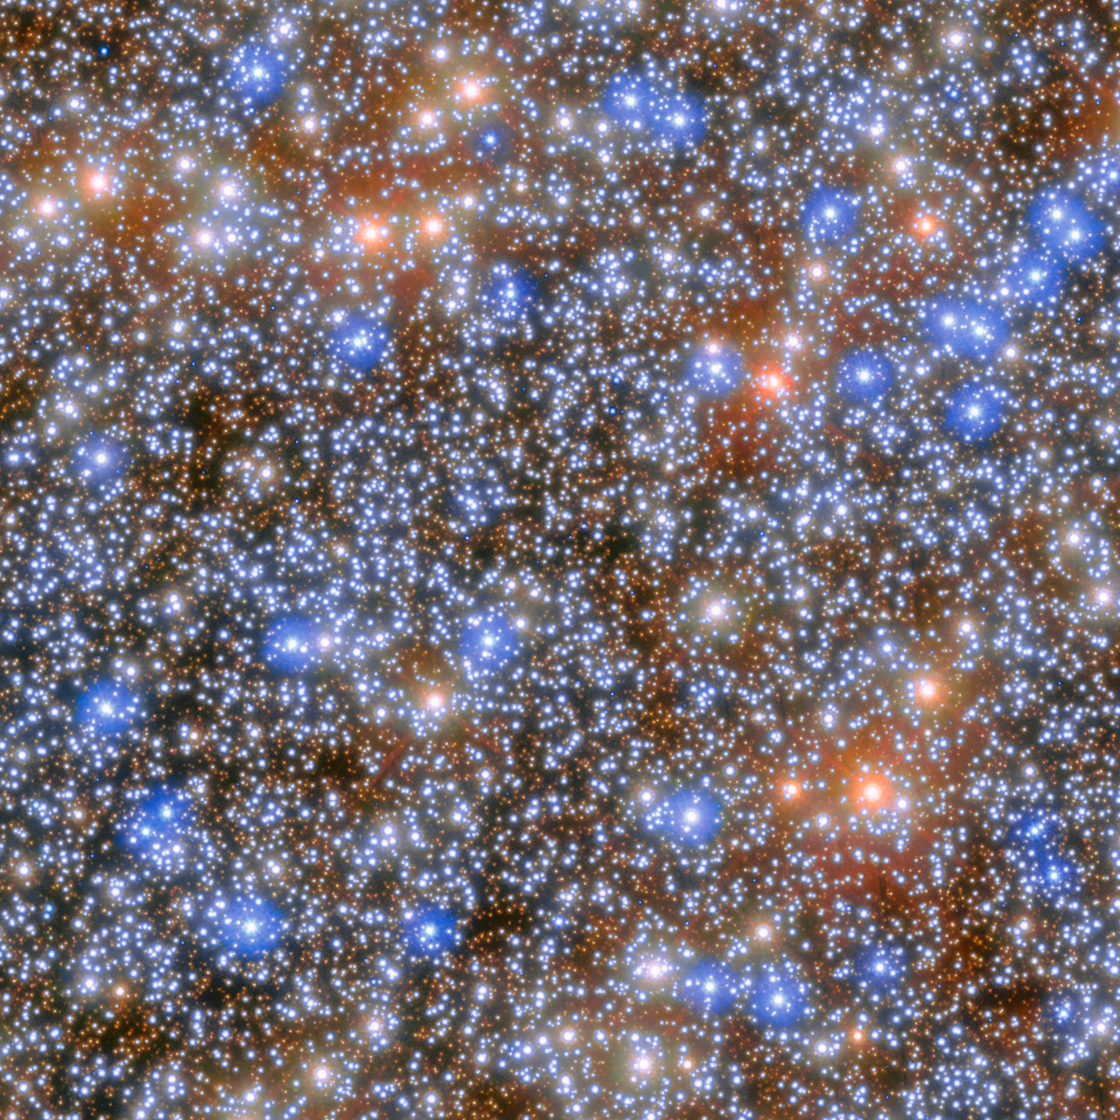

Omega Centauri (cropped)

An international team of astronomers has used more than 500 images from the NASA/ESA Hubble Space Telescope spanning two decades to detect seven fast-moving stars in the innermost region of Omega Centauri, the largest and brightest globular cluster in the sky. These stars provide compelling new evidence for the presence of an intermediate-mass black hole.

Omega Centauri is visible from Earth with the naked eye and is one of the favourite celestial objects for stargazers in the southern hemisphere. Although the cluster is 17 700 light-years away, lying just above the plane of the Milky Way, it appears almost as large as the full Moon when seen from a dark rural area. The exact classification of Omega Centauri has evolved through time, as our ability to study it has improved. It was first listed in Ptolemy's catalogue nearly two thousand years ago as a single star. Edmond Halley reported it as a nebula in 1677, and in the 1830s the English astronomer John Herschel was the first to recognise it as a globular cluster. Omega Centauri consists of roughly 10 million stars that are gravitationally bound.

This image shows the central region of the Omega Centauri globular cluster, where the IMBH candidate was found.

Credit: ESA/Hubble & NASA, M. Häberle (MPIA)